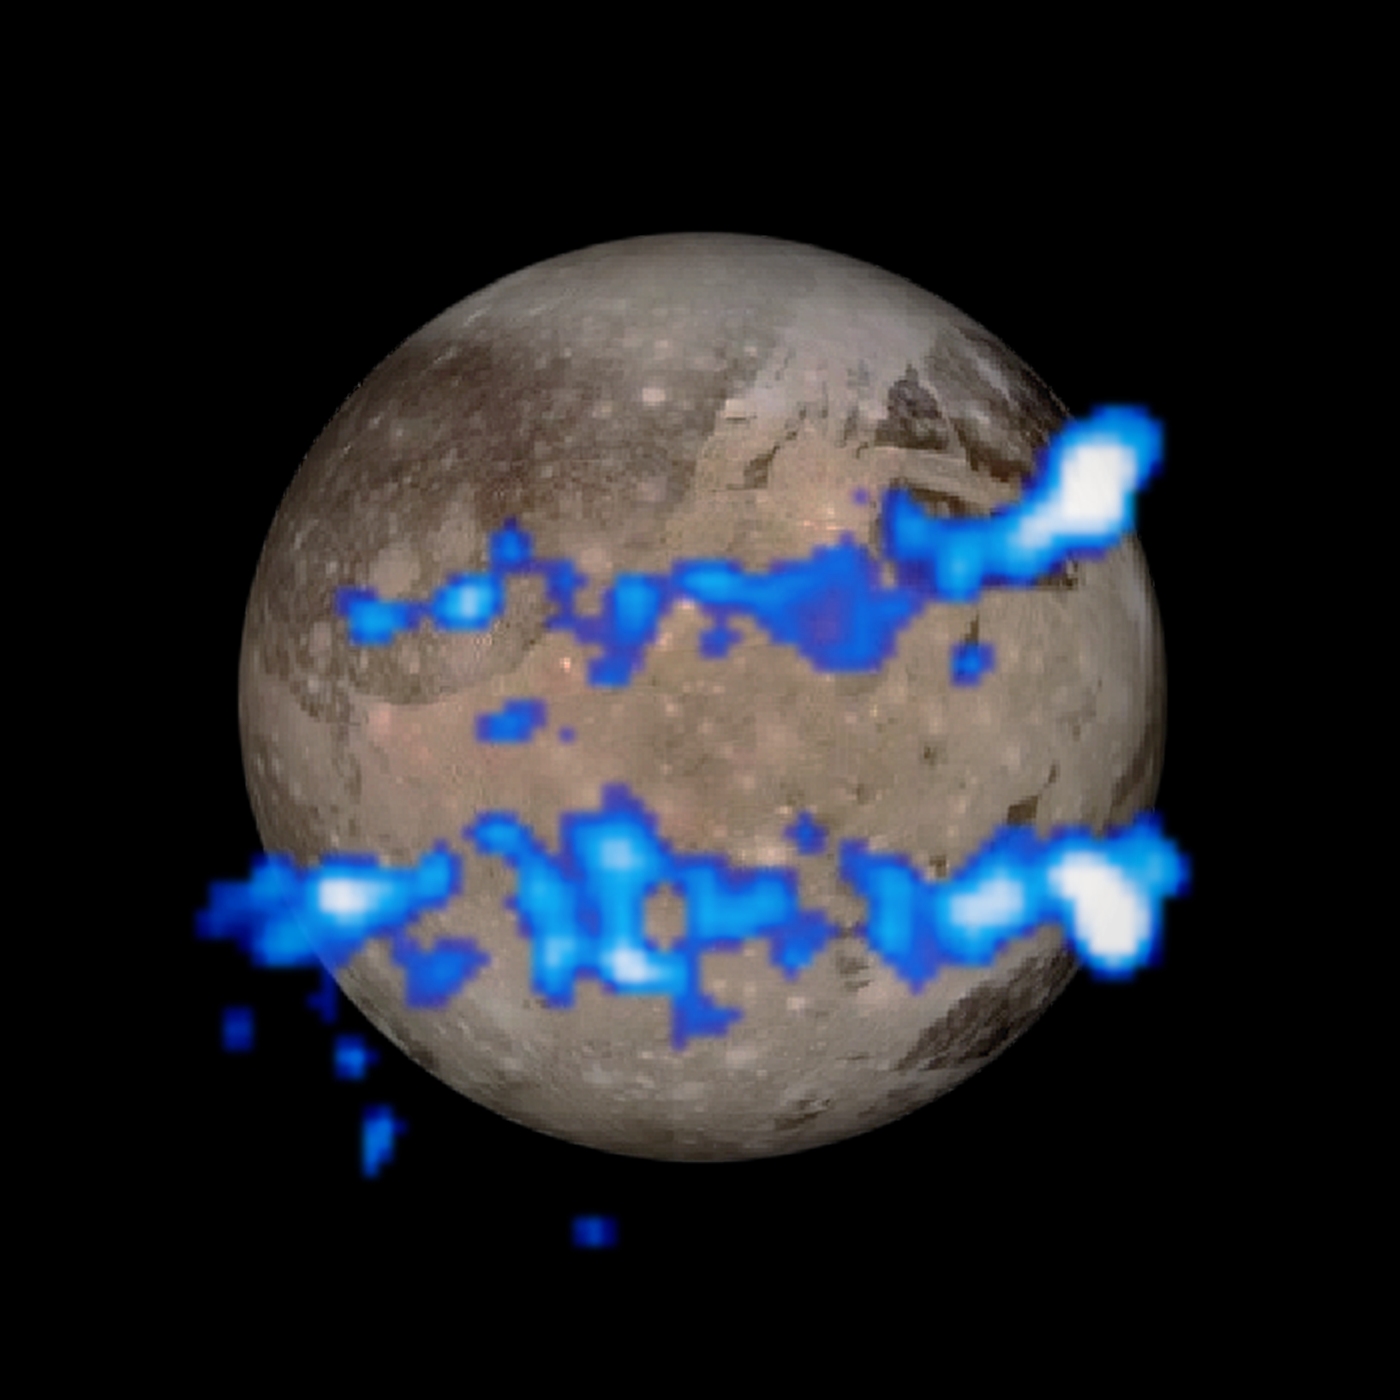

Hubble observation of aurorae on Ganymede

The NASA/ESA Hubble Space Telescope has observed a pair of auroral belts encircling the Jovian moon Ganymede. The belts were observed in ultraviolet light by the Space Telescope Imaging Spectrograph and are coloured blue in this illustration.

They are overlaid on a visible-light image of Ganymede taken by NASA's Galileo orbiter. The locations of the glowing aurorae are determined by the moon's magnetic field, and therefore provide a probe of the moon's interior, where the magnetic field is generated. The amount of rocking of the magnetic field, caused by its interaction with Jupiter's own immense magnetosphere, provides evidence that the moon has a subsurface ocean of saline water.

Credit: NASA, ESA, and J. Saur (University of Cologne, Germany)